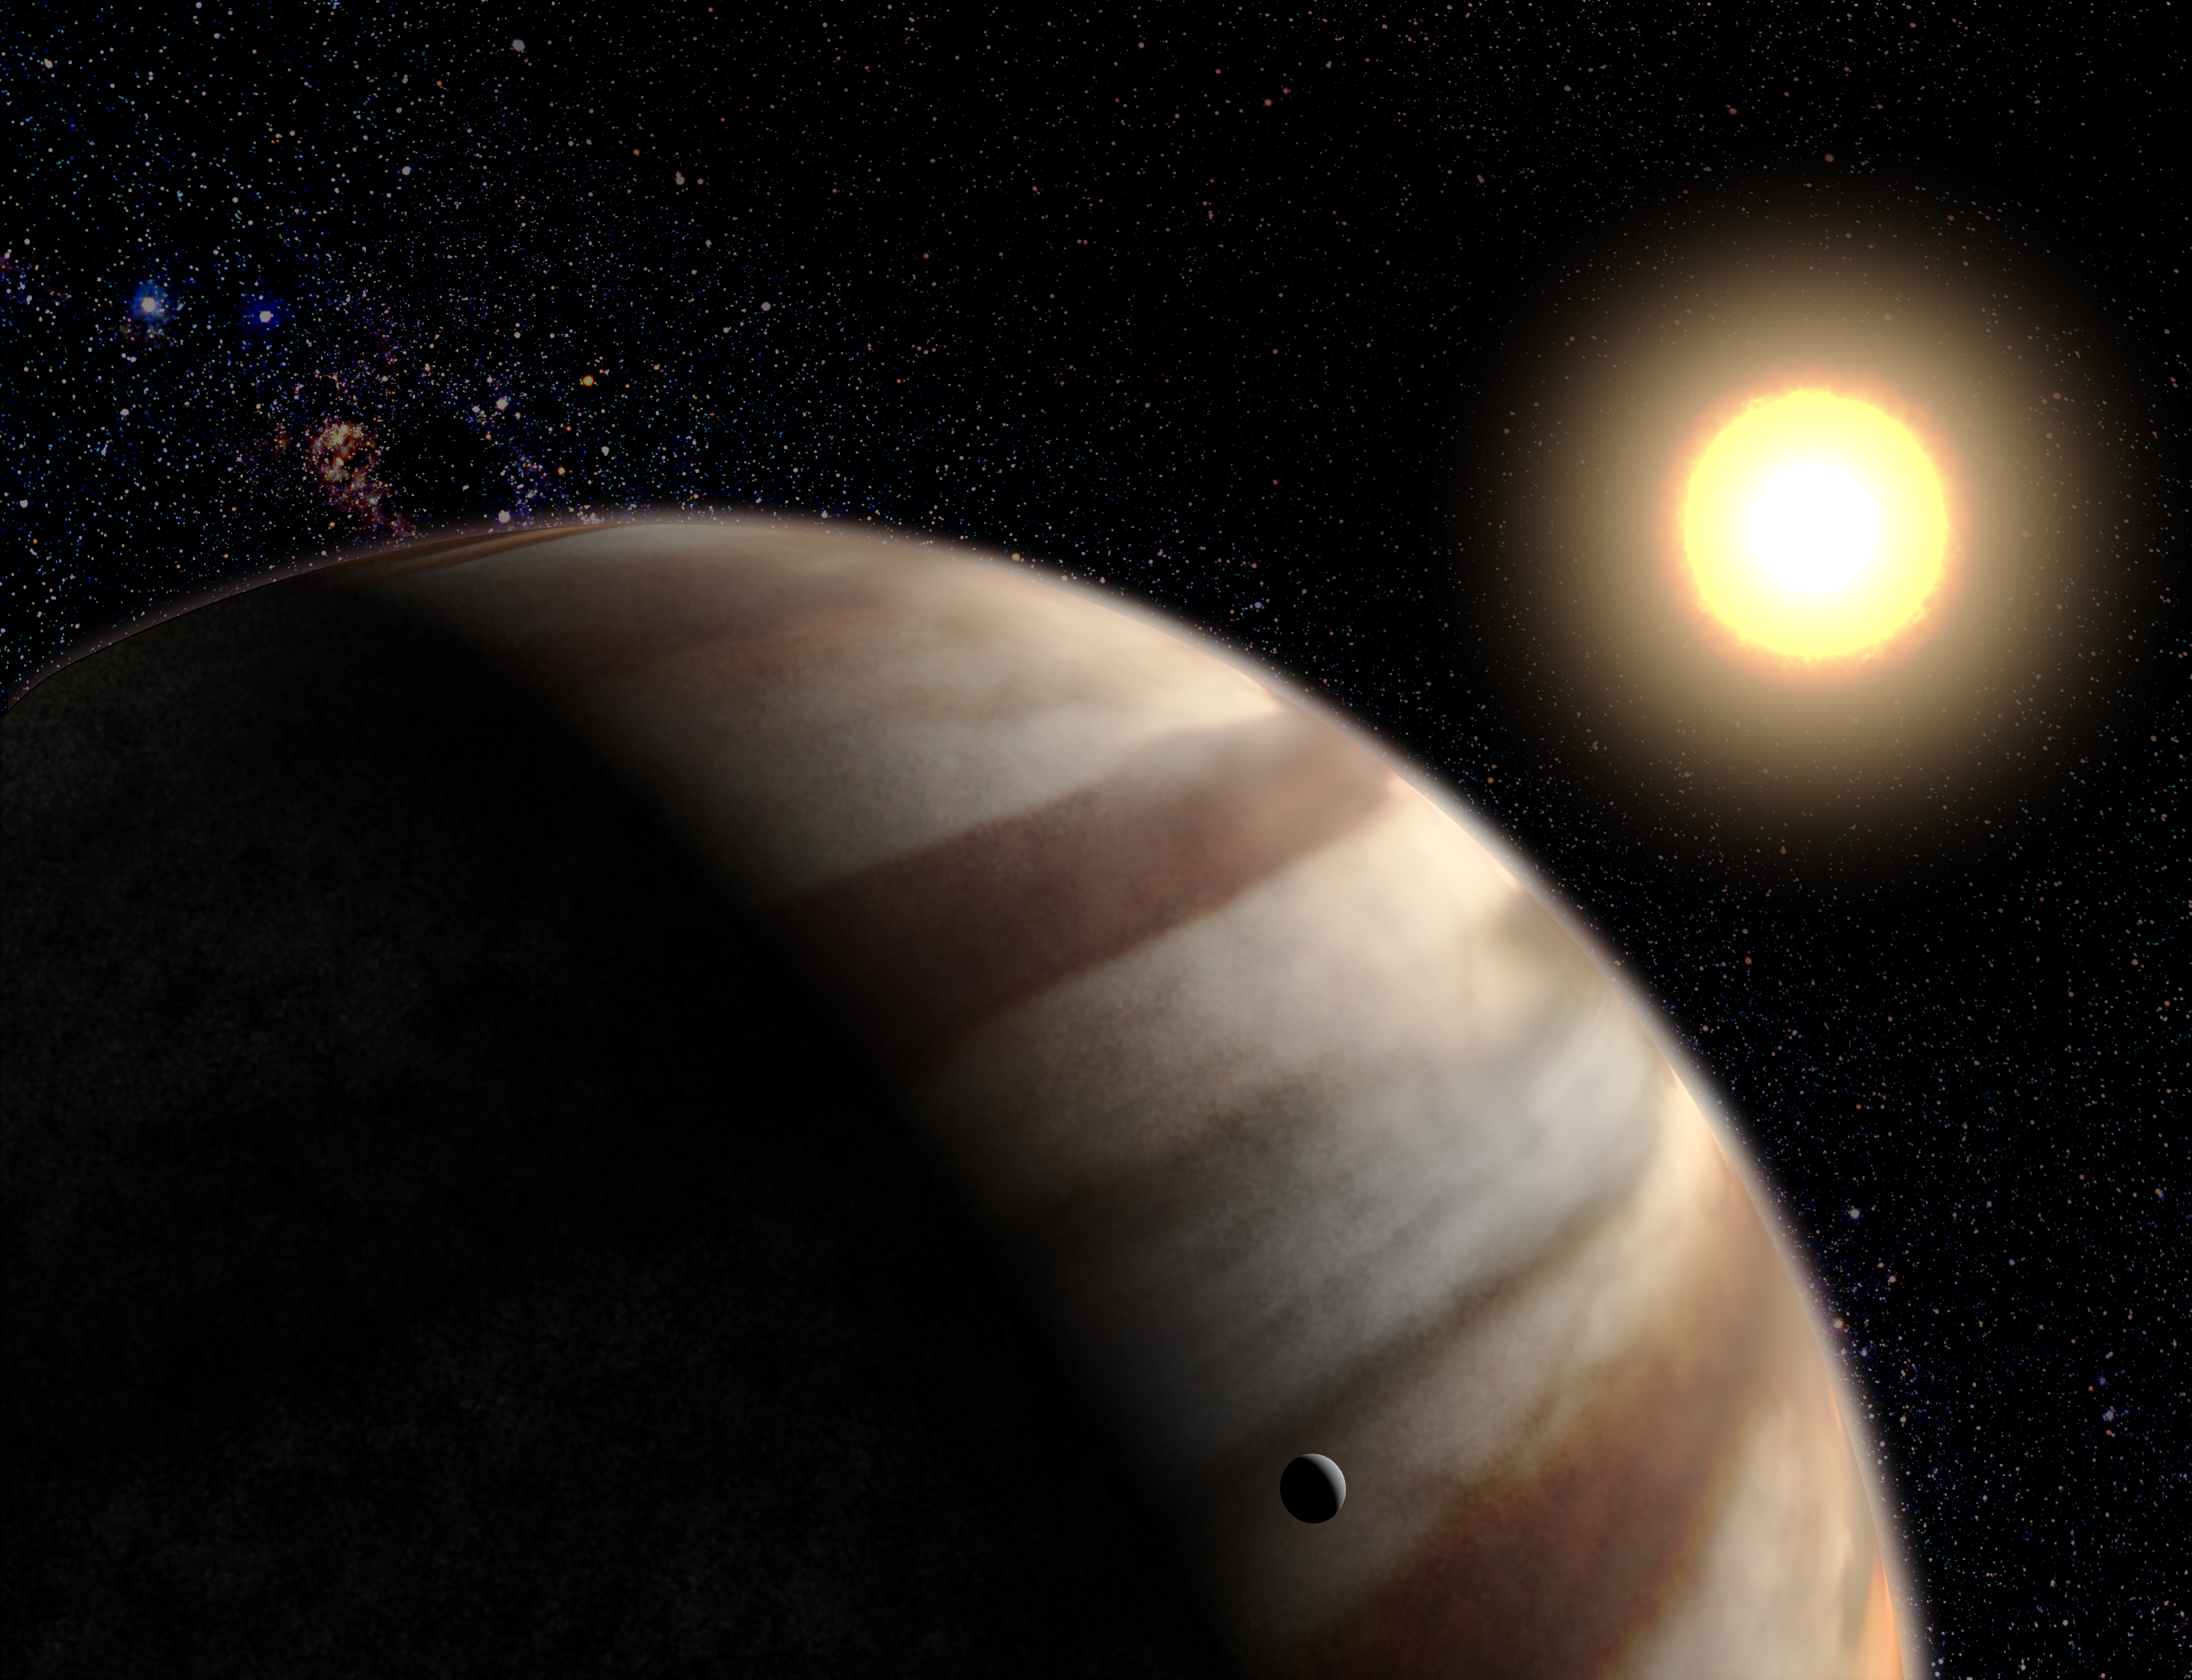

First Direct Measurements of Atmosphere on World Around Another Star (artist's impression)

Astronomers using the Hubble Space Telescope have made the first direct detection of the atmosphere of a planet orbiting a star outside our solar system.

Their unique observations demonstrate that it is possible with Hubble and other telescopes to measure the chemical makeup of alien planet atmospheres and to potentially search for the chemical markers of life beyond Earth.

The planet orbits a yellow, Sun-like star called HD 209458, located 150 light-years away in the constellation Pegasus.

Credit: G. Bacon (STScI/AVL)